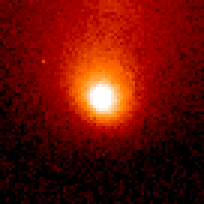

Comet Hale-Bopp

This is a series of Hubble Space Telescope observations of the region around the nucleus of Hale-Bopp, taken on eight different dates since September 1995. They chronicle changes in the evolution of the nucleus as it moves ever closer to, and is warmed by, the sun.

Credit: Harold Weaver (Johns Hopkins University) and NASA/ESA